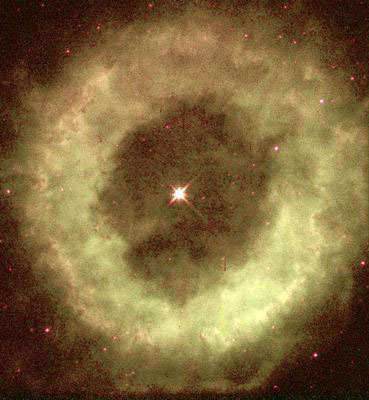

WFPC2 V and I image of NGC 6369

The NASA/ESA Hubble Space Telescope has caught a glimpse of a cosmic ghost, the glowing remains of a dying star called NGC 6369. The glowing apparition is known to amateur astronomers as the 'Little Ghost Nebula', because it appears as a small, ghostly cloud surrounding the faint, dying central star.

Credit: NASA/ESA and H. Bond (STScI)